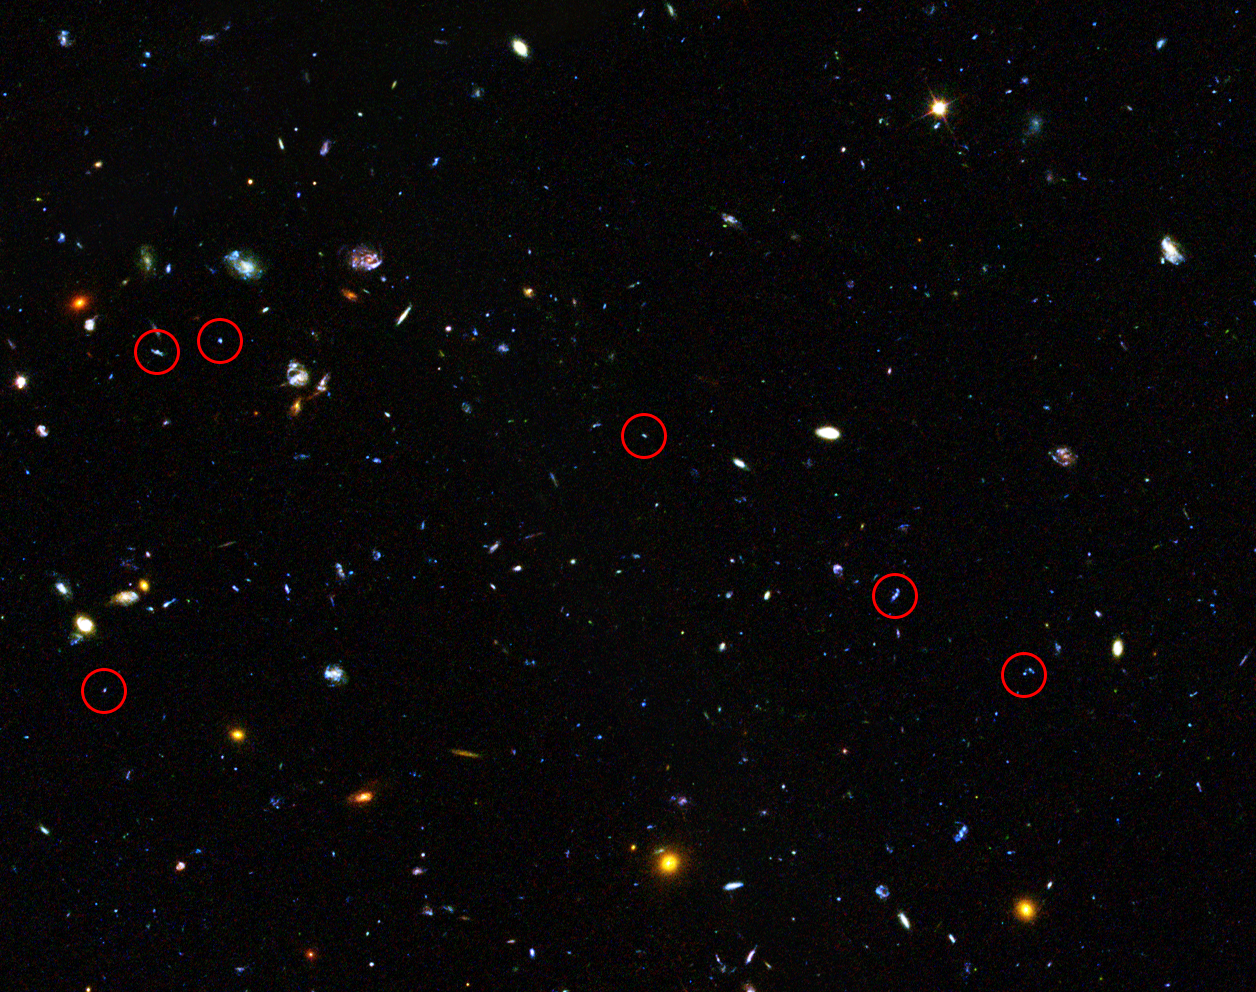

GOODS field containing distant dwarf galaxies forming stars at an incredible rate (annotated)

This image shows the area containing a sample of dwarf galaxies studied to unlock secrets of star formation in the early Universe.

Highlighted are faint dwarf galaxies that reside in the early Universe, between two and six billion years after the Big Bang, an important time period when most of the stars in the Universe were formed. Some of these galaxies are undergoing starbursts and have been studied by astronomers to deduce their contribution to star formation in this crucial era of the Universe’s history.

The image is part of the Great Observatories Origins Deep Survey (GOODS), and this image shows only one section that the survey covered.

Credit: NASA, ESA, the GOODS Team and M. Giavalisco (STScI/University of Massachusetts)
Acknowledgement: H.Atek (EPFL, Switzerland) and J-P.Kneib (EPFL, Switzerland)